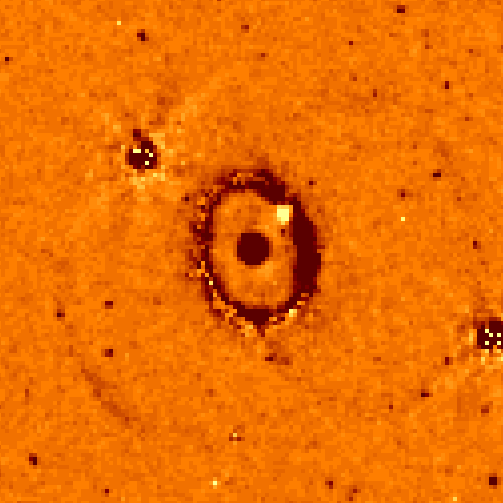

Supernova 1987a Ring

Latest Hubble image shows knot in ring significantly brighter.

Credit: Peter Garnavich (Harvard-Smithsonian Center for Astrophysics), andNASA/ESA